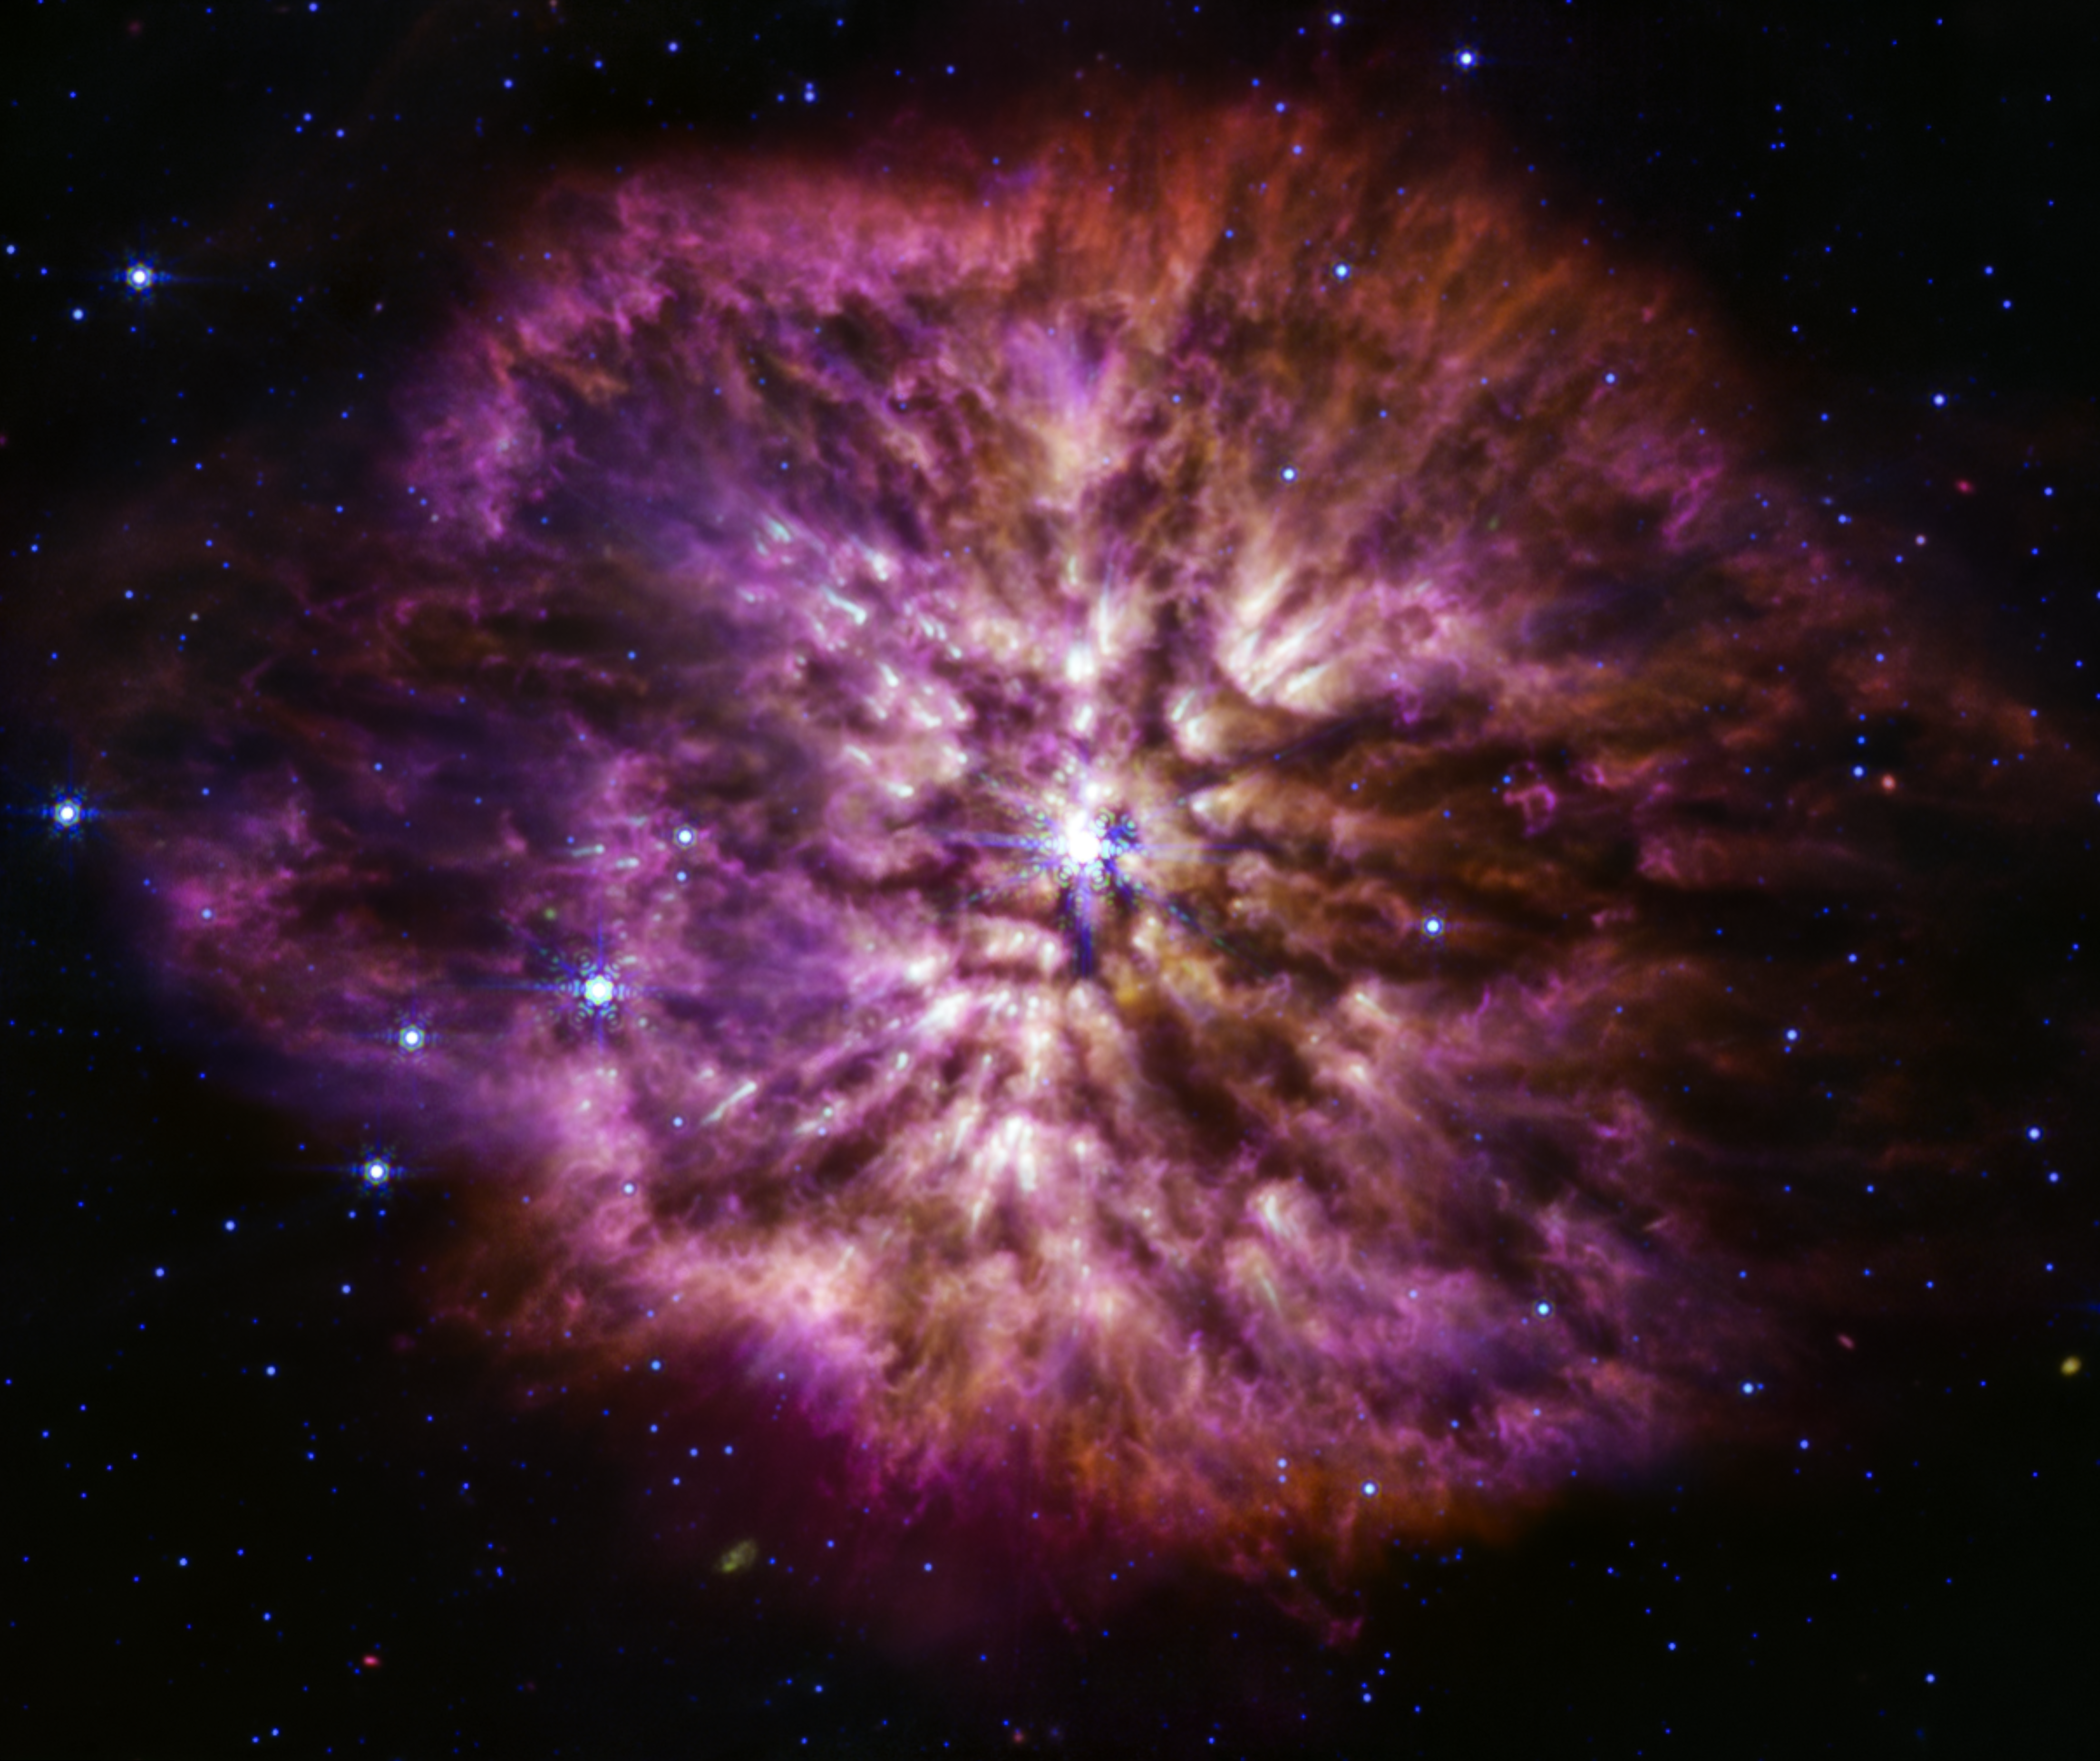

Wolf-Rayet 124 (MIRI image)

Wolf-Rayet stars are known to be efficient dust producers, and the Mid-Infrared Instrument (MIRI) on the NASA/ESA/CSA James Webb Space Telescope shows this to great effect. Cooler cosmic dust glows at the longer mid-infrared wavelengths, displaying the structure of WR 124’s nebula. The nebula is made of material cast off from the ageing star in random ejections, and from dust produced in the ensuing turbulence. This brilliant stage of mass loss precedes the star’s eventual supernova, when nuclear fusion in its core stops and the pressure of gravity causes it to collapse in on itself, and then explode. As MIRI demonstrates here, Webb will help astronomers to explore questions that were previously only available to theory, questions like how much dust stars like this create before exploding in a supernova, and how much of that dust is large enough to survive the blast and go on to serve as a building block of future stars and planets.

Credit: NASA, ESA, CSA, STScI, Webb ERO Production Team